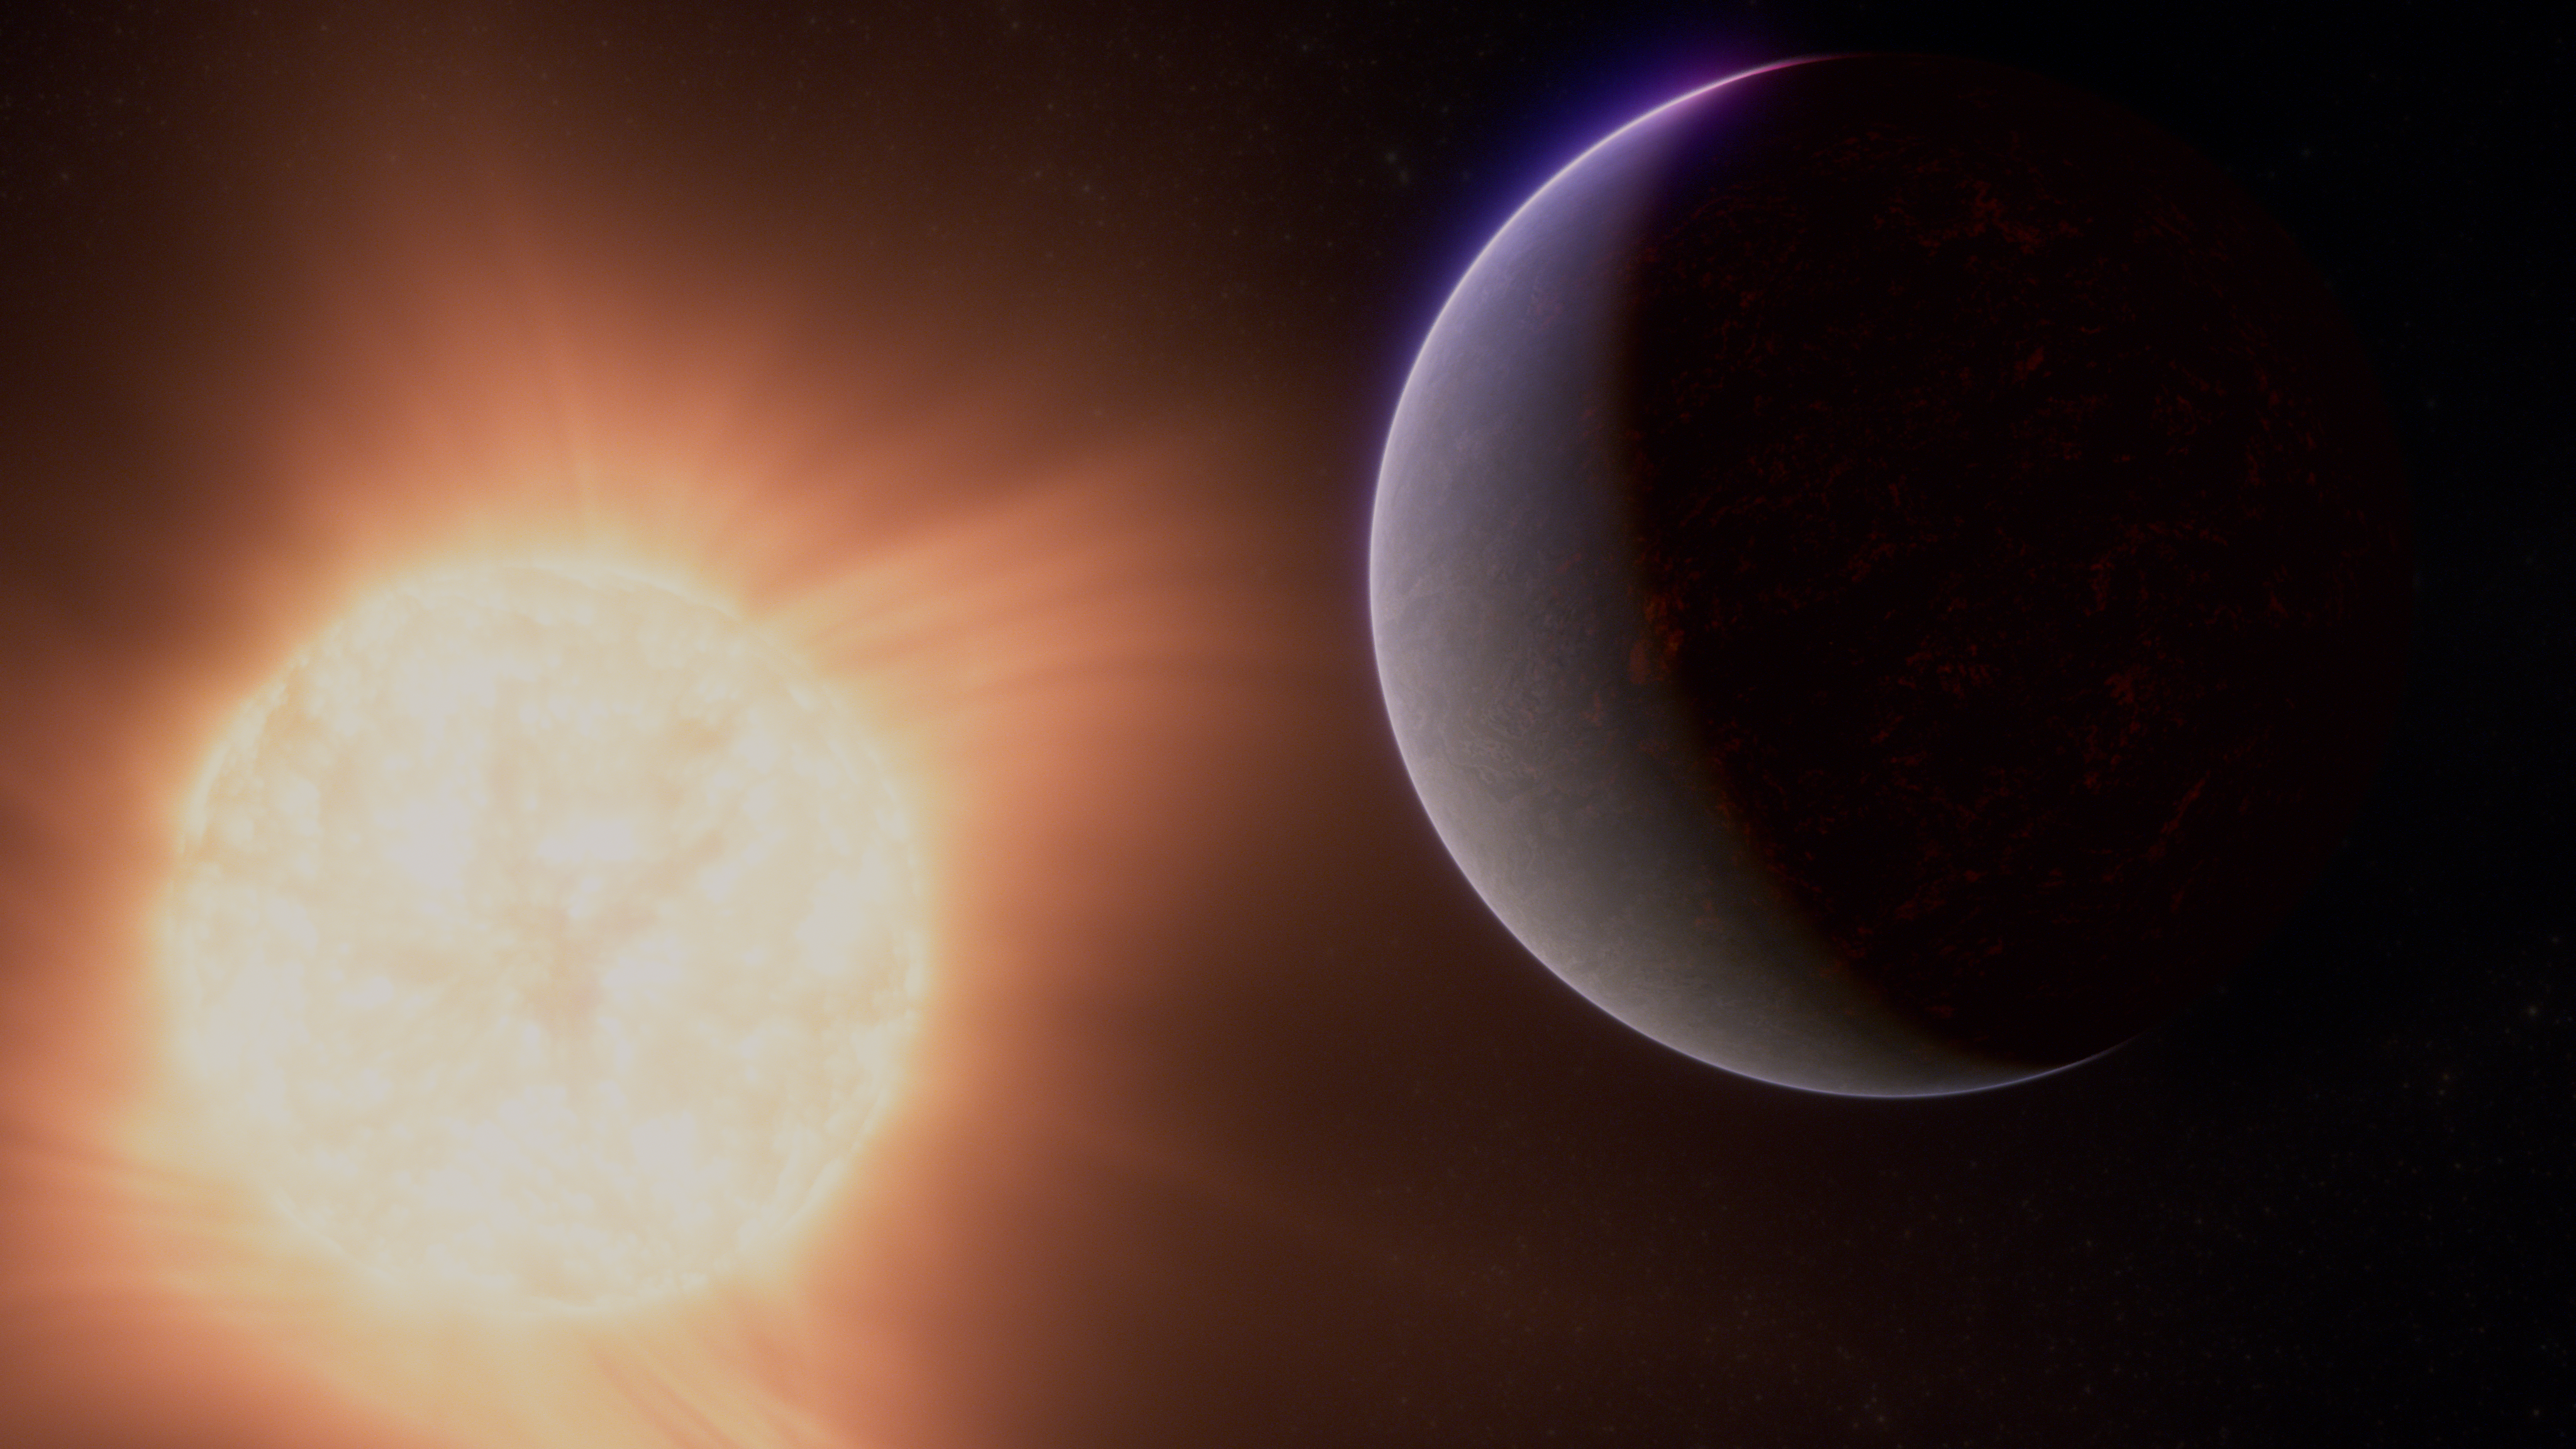

Super-Earth exoplanet 55 Cancri e (artist’s concept)

This artist’s concept shows what the exoplanet 55 Cancri e could look like.

Also called Janssen, 55 Cancri e is a so-called super-Earth, a rocky planet significantly larger than Earth but smaller than Neptune, which orbits its star at a distance of only 2.25 million kilometres (0.015 astronomical units), completing one full orbit in less than 18 hours. In comparison, Mercury is 25 times farther from the Sun than 55 Cancri e is from its star. The system, which also includes four large gas-giant planets, is located about 41 light-years from Earth, in the constellation Cancer.

Observations from Webb’s NIRCam and MIRI suggest that the planet may be surrounded by an atmosphere rich in carbon dioxide (CO2) or carbon monoxide (CO). Because it is so close to its star, the planet is extremely hot and is thought to be covered in molten rock. Researchers think that the gases that make up the atmosphere could have bubbled out of the magma.

The star, 55 Cancri, is a K-type star nearly the same size and mass as the Sun, but slightly cooler and dimmer. It is just bright enough to see with the naked eye in a very dark sky. The star and planet are so close to each other that the star would appear 70 times wider in the planet’s sky than the Sun appears in our sky. In addition, because the planet is likely to be tidally locked, from any given point the star would appear fixed in the sky.

This artist’s concept is based on new data gathered by NIRCam and MIRI as well as previous observations from other ground- and space-based telescopes, including NASA’s Hubble and the now-retired Spitzer space telescopes. Webb has not captured any images of the planet.

Credit: NASA, ESA, CSA, R. Crawford (STScI)